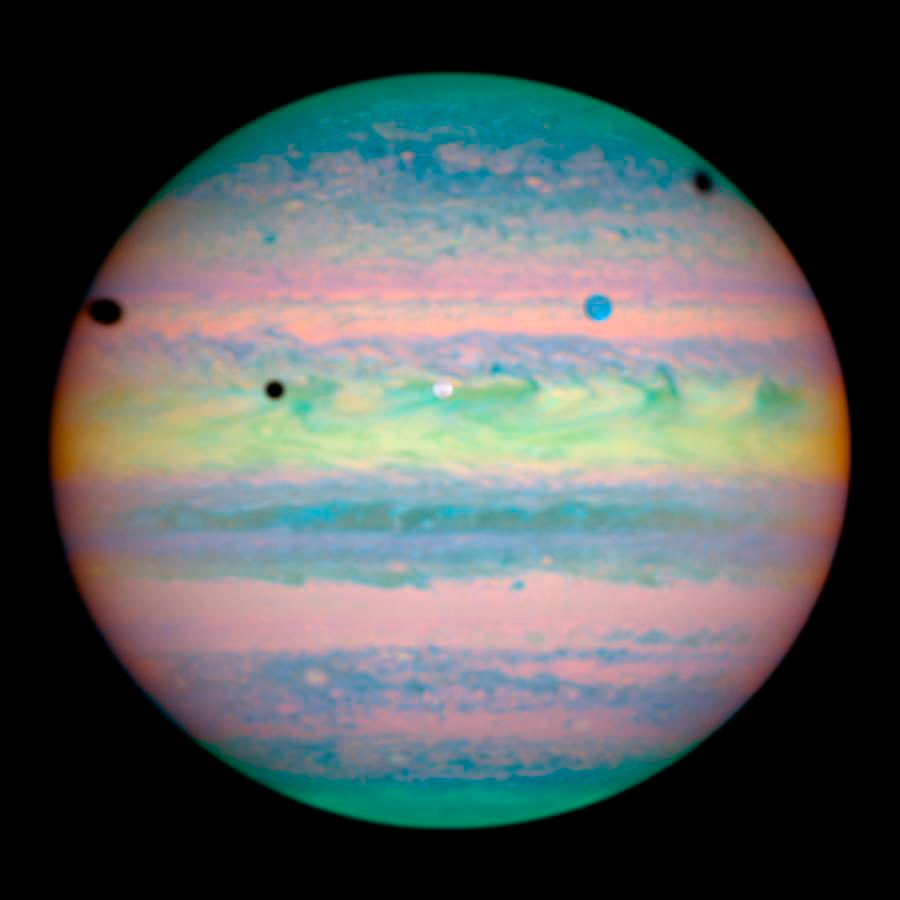

Hubble Spots Rare Triple Eclipse on Jupiter

At first glance, Jupiter looks like it has a mild case of the measles. Five spots - one colored white, one blue, and three black - are scattered across the upper half of the planet. Closer inspection by NASA/ESA Hubble Space Telescope reveals that these spots are actually a rare alignment of three of Jupiter's largest moons - Io, Ganymede, and Callisto - across the planet's face. In this image, the telltale signatures of this alignment are the shadows [the three black circles] cast by the moons. Io's shadow is located just above centre and to the left; Ganymede's on the planet's left edge; and Callisto's near the right edge. Only two of the moons, however, are visible in this image. Io is the white circle in the centre of the image, and Ganymede is the blue circle at upper right. Callisto is out of the image and to the right.

Credit: NASA, ESA, and E. Karkoschka (University of Arizona)